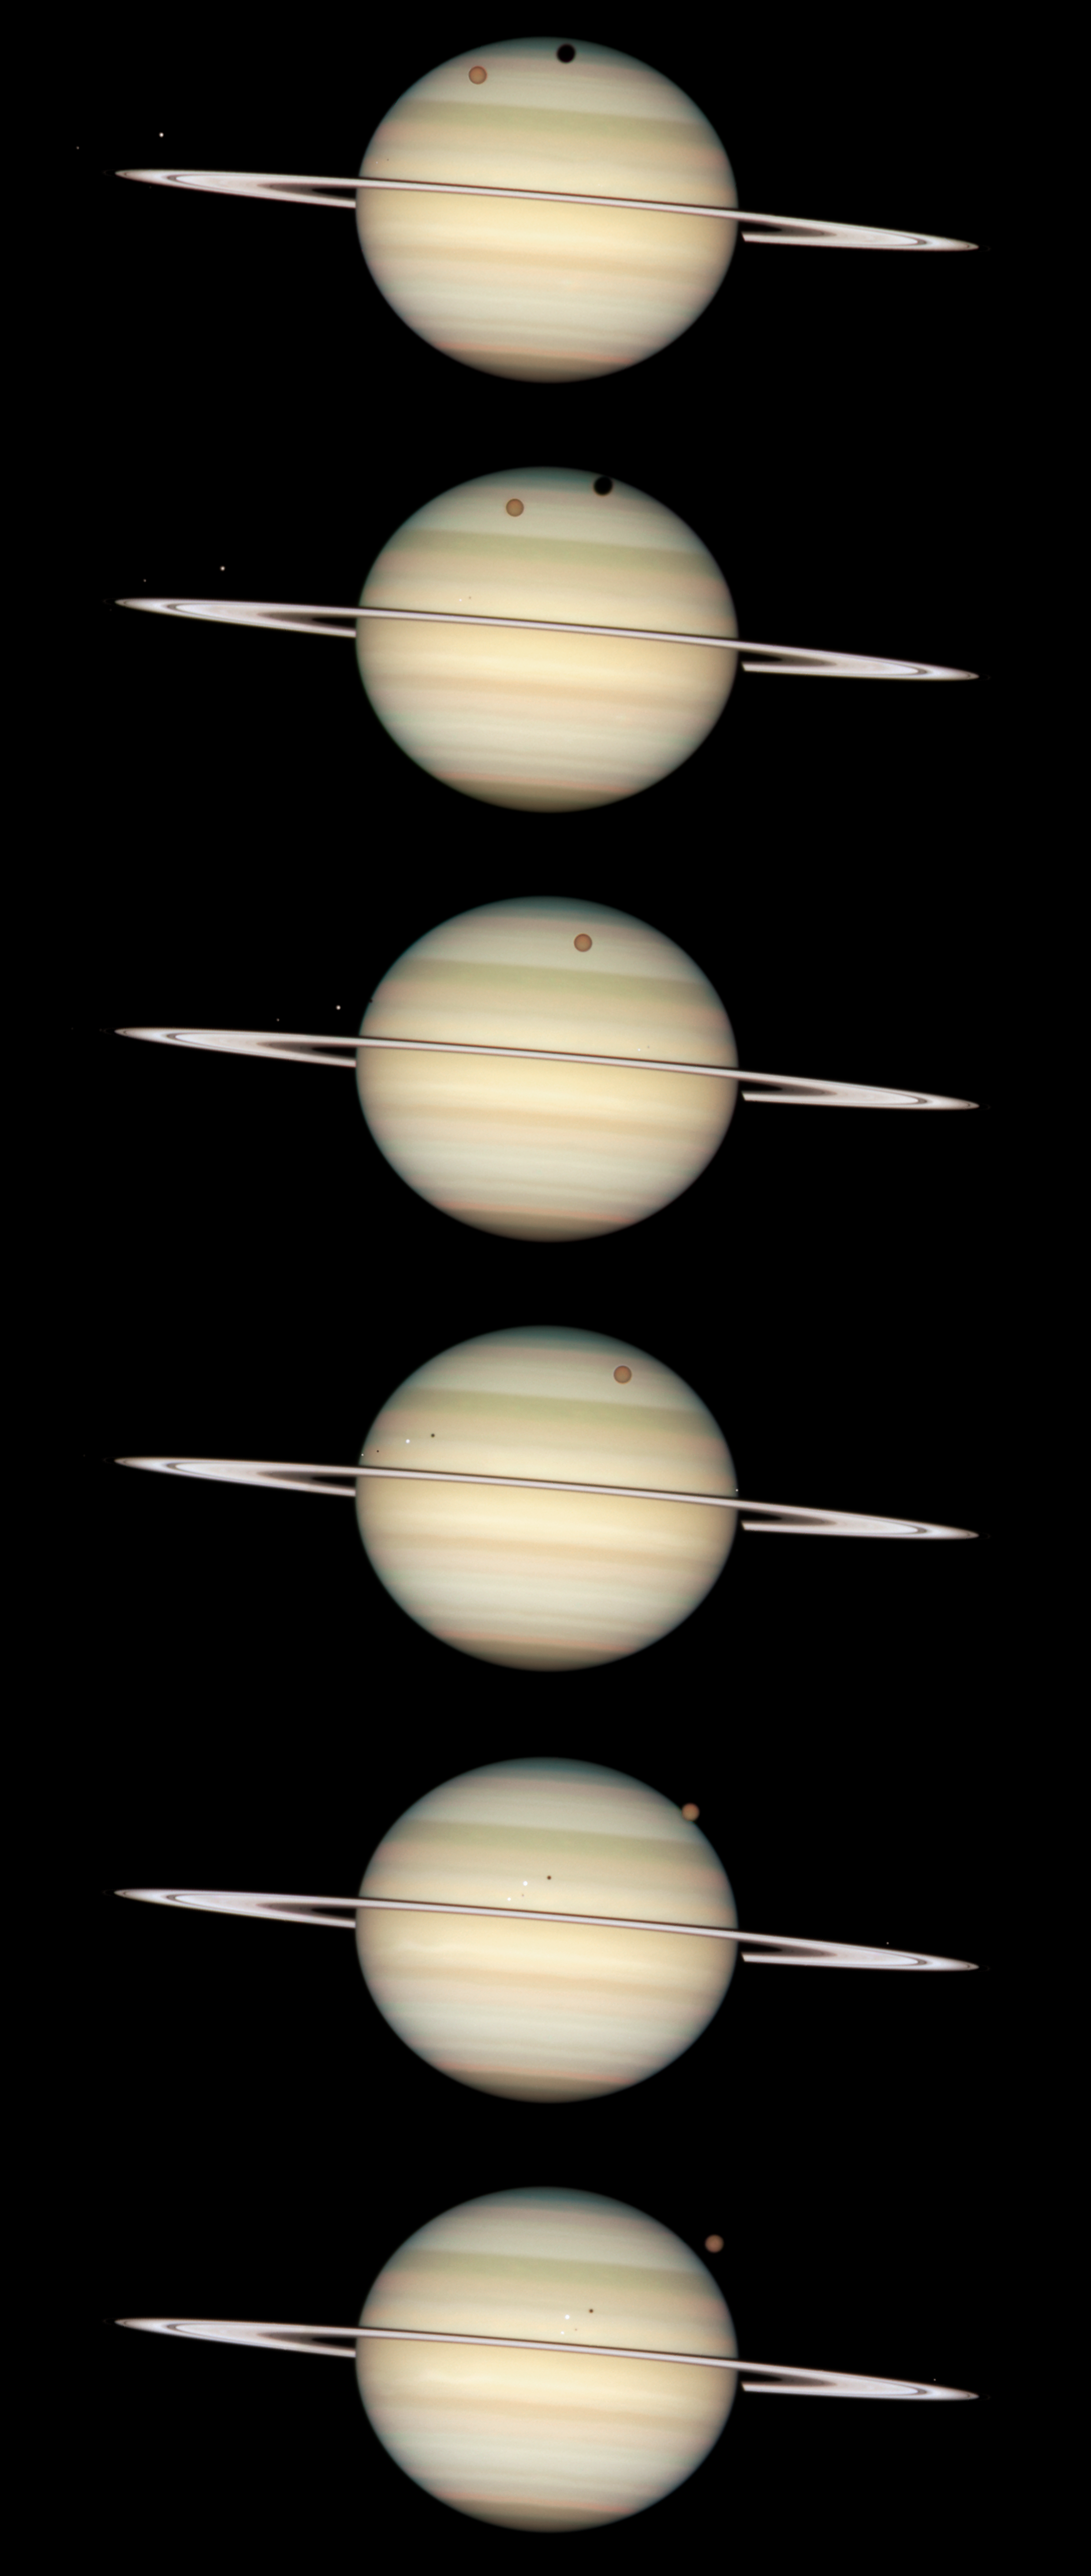

Photo sequence of Saturn: 24 February 2009

This Hubble image shows the progression of four of Saturn's moon as they circle their parent planet. The orange moon in the image is Titan, Saturn's largest.

Credit: NASA, ESA and the Hubble Heritage Team (STScI/AURA). Acknowledgment: M. Wong (STScI/UC Berkeley) and C. Go (Philippines)